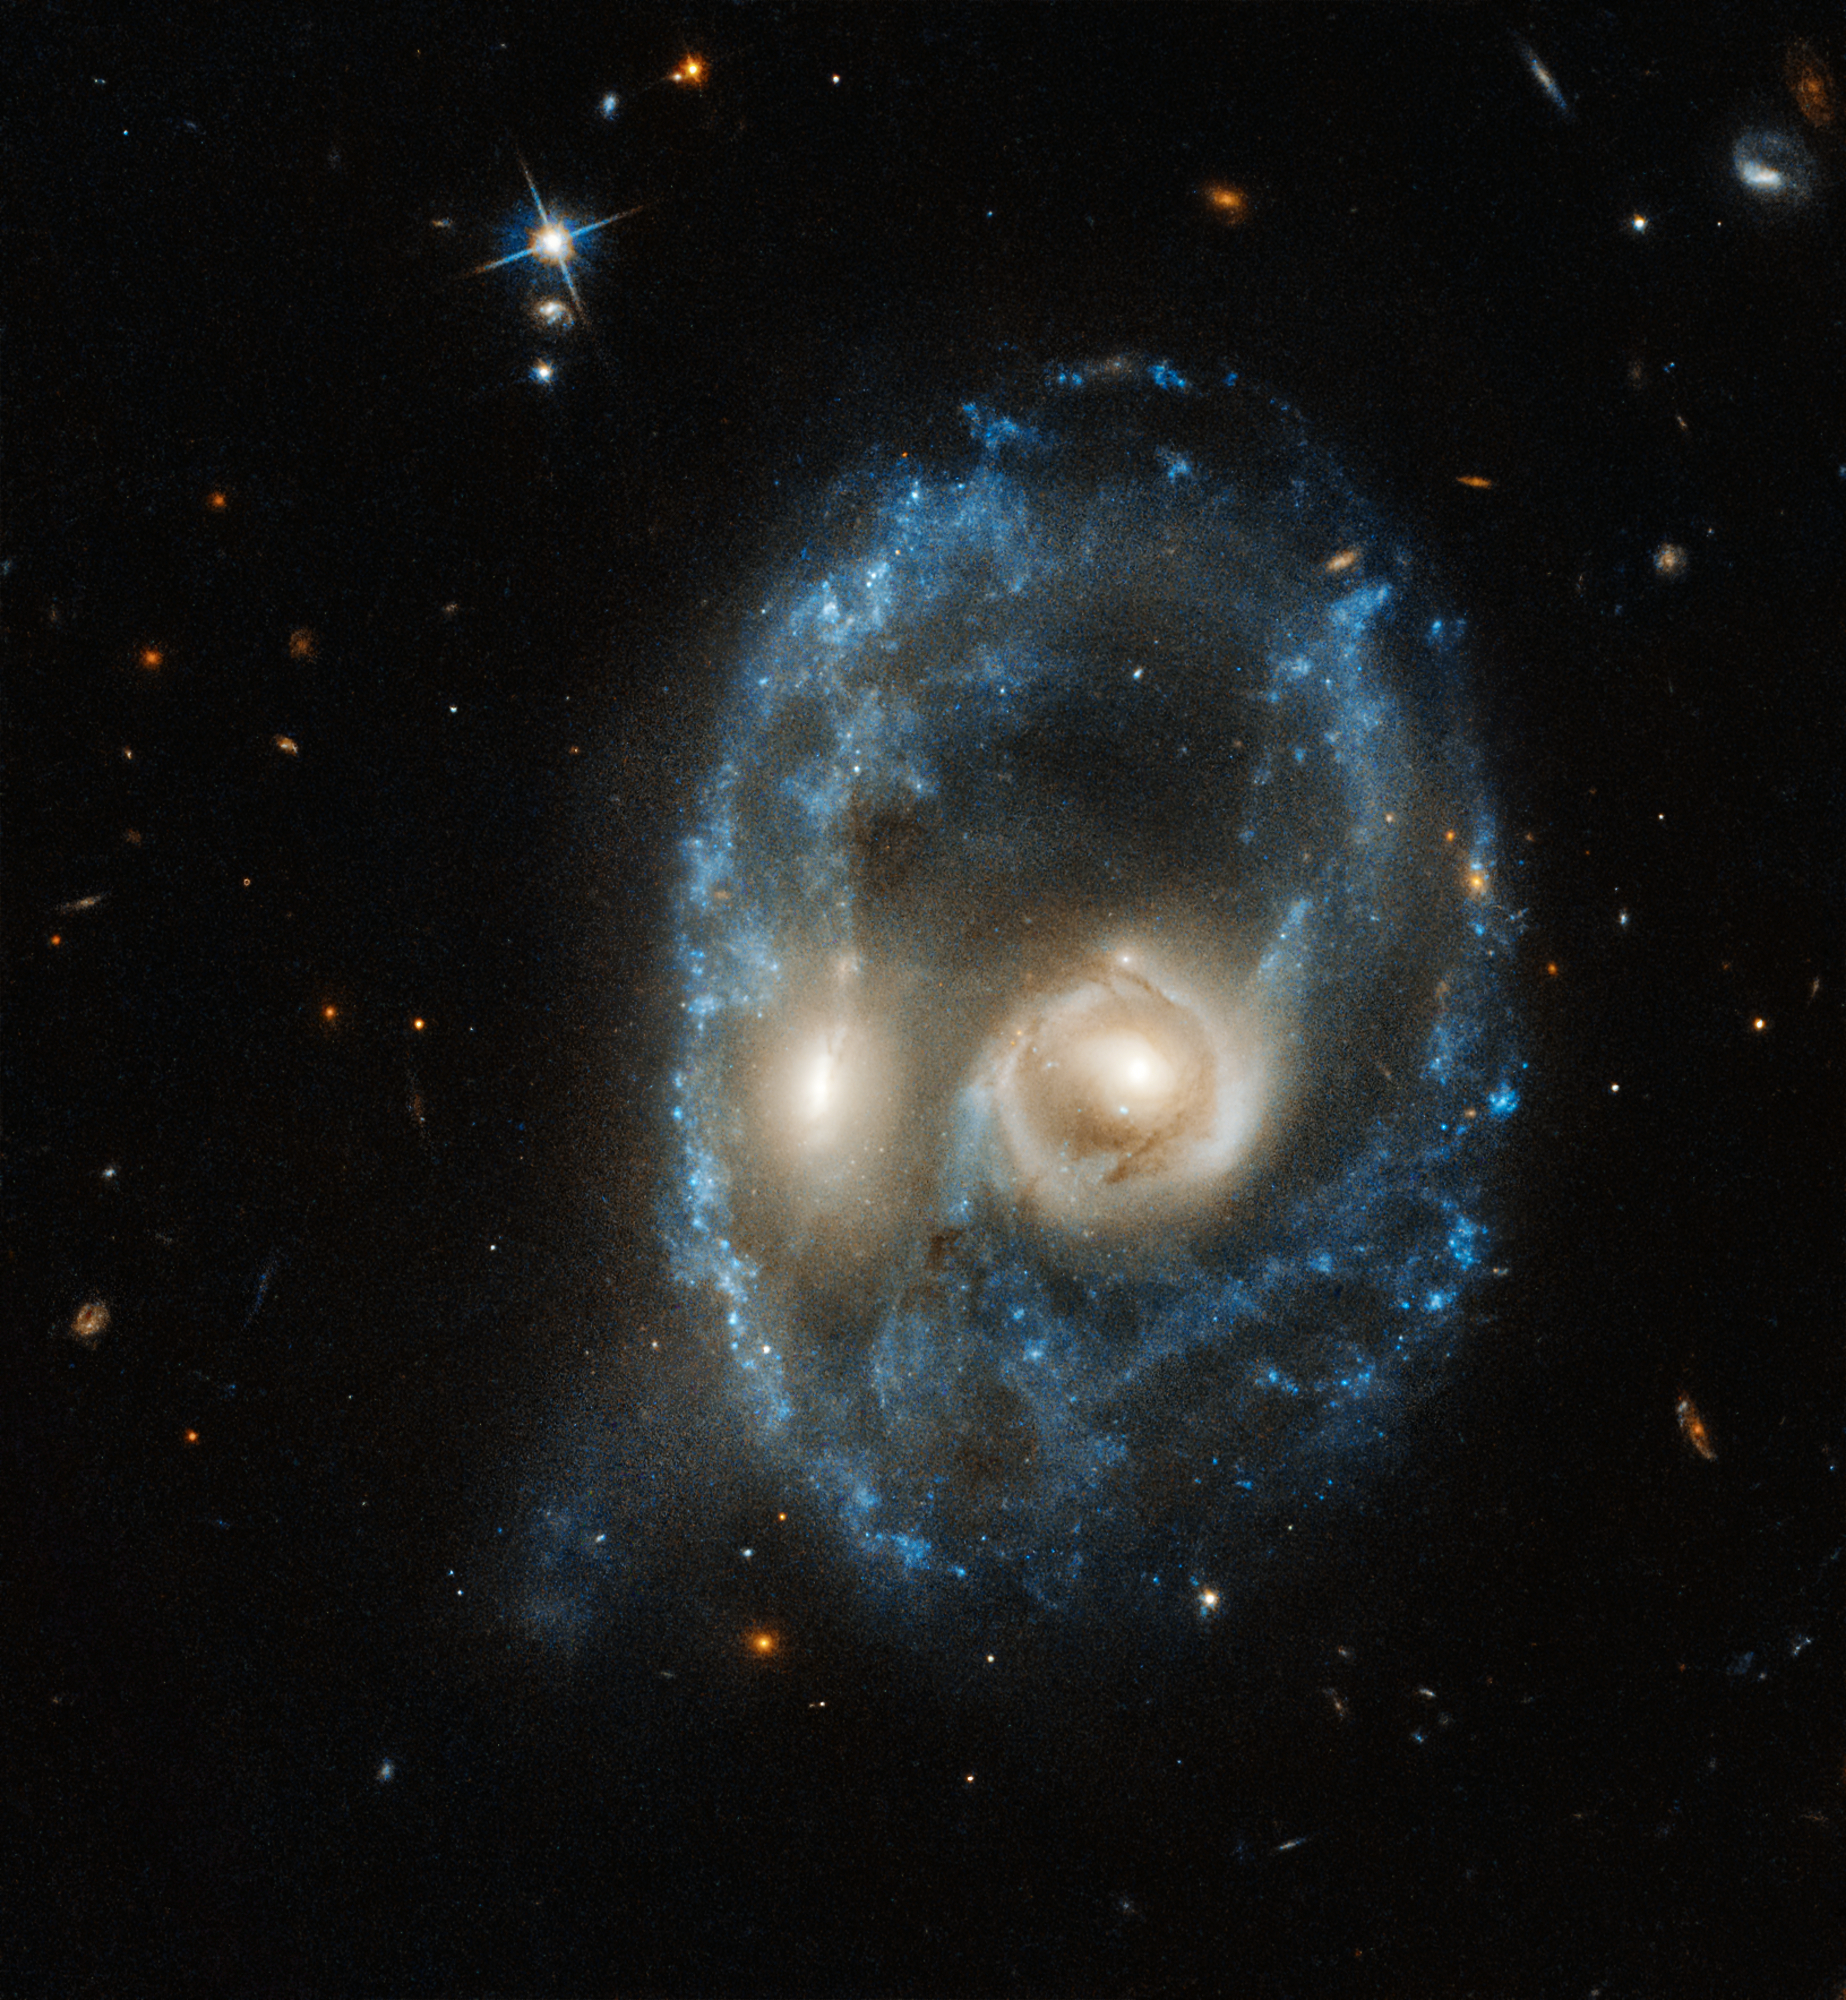

Arp-Madore 2026-424

This new image from the NASA/ESA Hubble Space Telescope captures two galaxies of equal size in a collision that appears to resemble a ghostly face. This observation was made on 19 June 2019 in visible light by the telescope’s Advanced Camera for Surveys.

Residing 704 million light-years from Earth, this system is catalogued as Arp-Madore 2026-424 (AM 2026-424) in the Arp-Madore “Catalogue of Southern Peculiar Galaxies and Associations”.

Credit: NASA, ESA, J. Dalcanton, B.F. Williams, and M. Durbin (University of Washington)